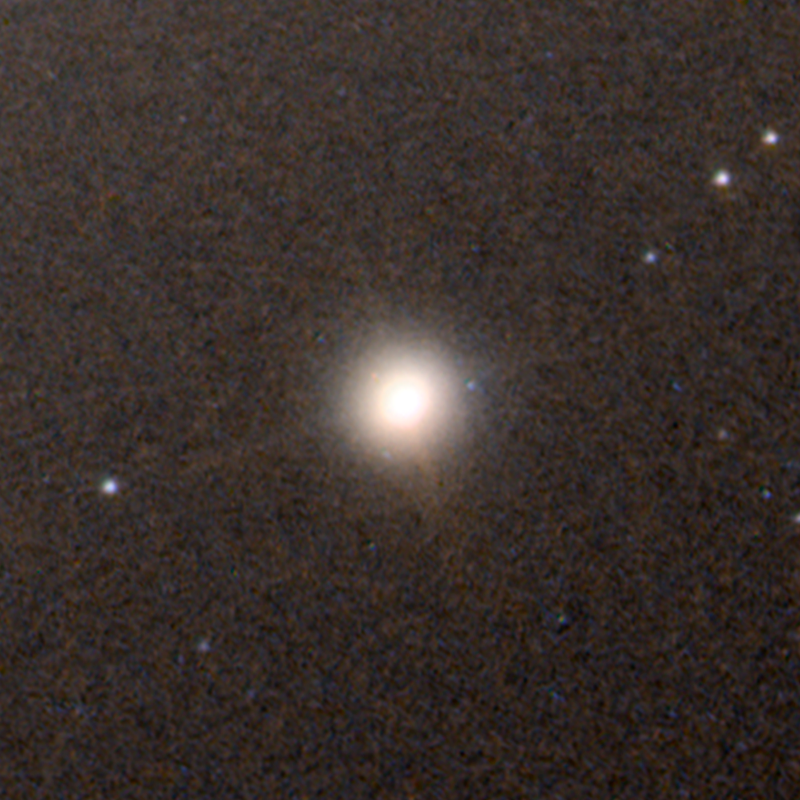

Ultracompact dwarf galaxy M60-UCD1 as viewed by Hubble

This NASA/ESA Hubble Space Telescope image shows the dwarf galaxy M60-UDC1. Lying about 50 million light-years away, M60-UCD1 is a tiny galaxy with a diameter of 300 light-years — just 1/500th of the diameter of the Milky Way! Despite its size it is pretty crowded, containing some 140 million stars.

The dwarf galaxy may actually be the stripped remnant of a larger galaxy that was torn apart during a close encounter with its neighbour, a massive galaxy called Messier 60.

Circumstantial evidence for this comes from the recent discovery of a monster black hole, which is not visible in this image, at the centre of the dwarf. The black hole makes up 15 percent of the mass of the entire galaxy, making it much too big to have formed inside a dwarf galaxy.

Credit: NASA, ESA and A. Seth (University of Utah, USA)